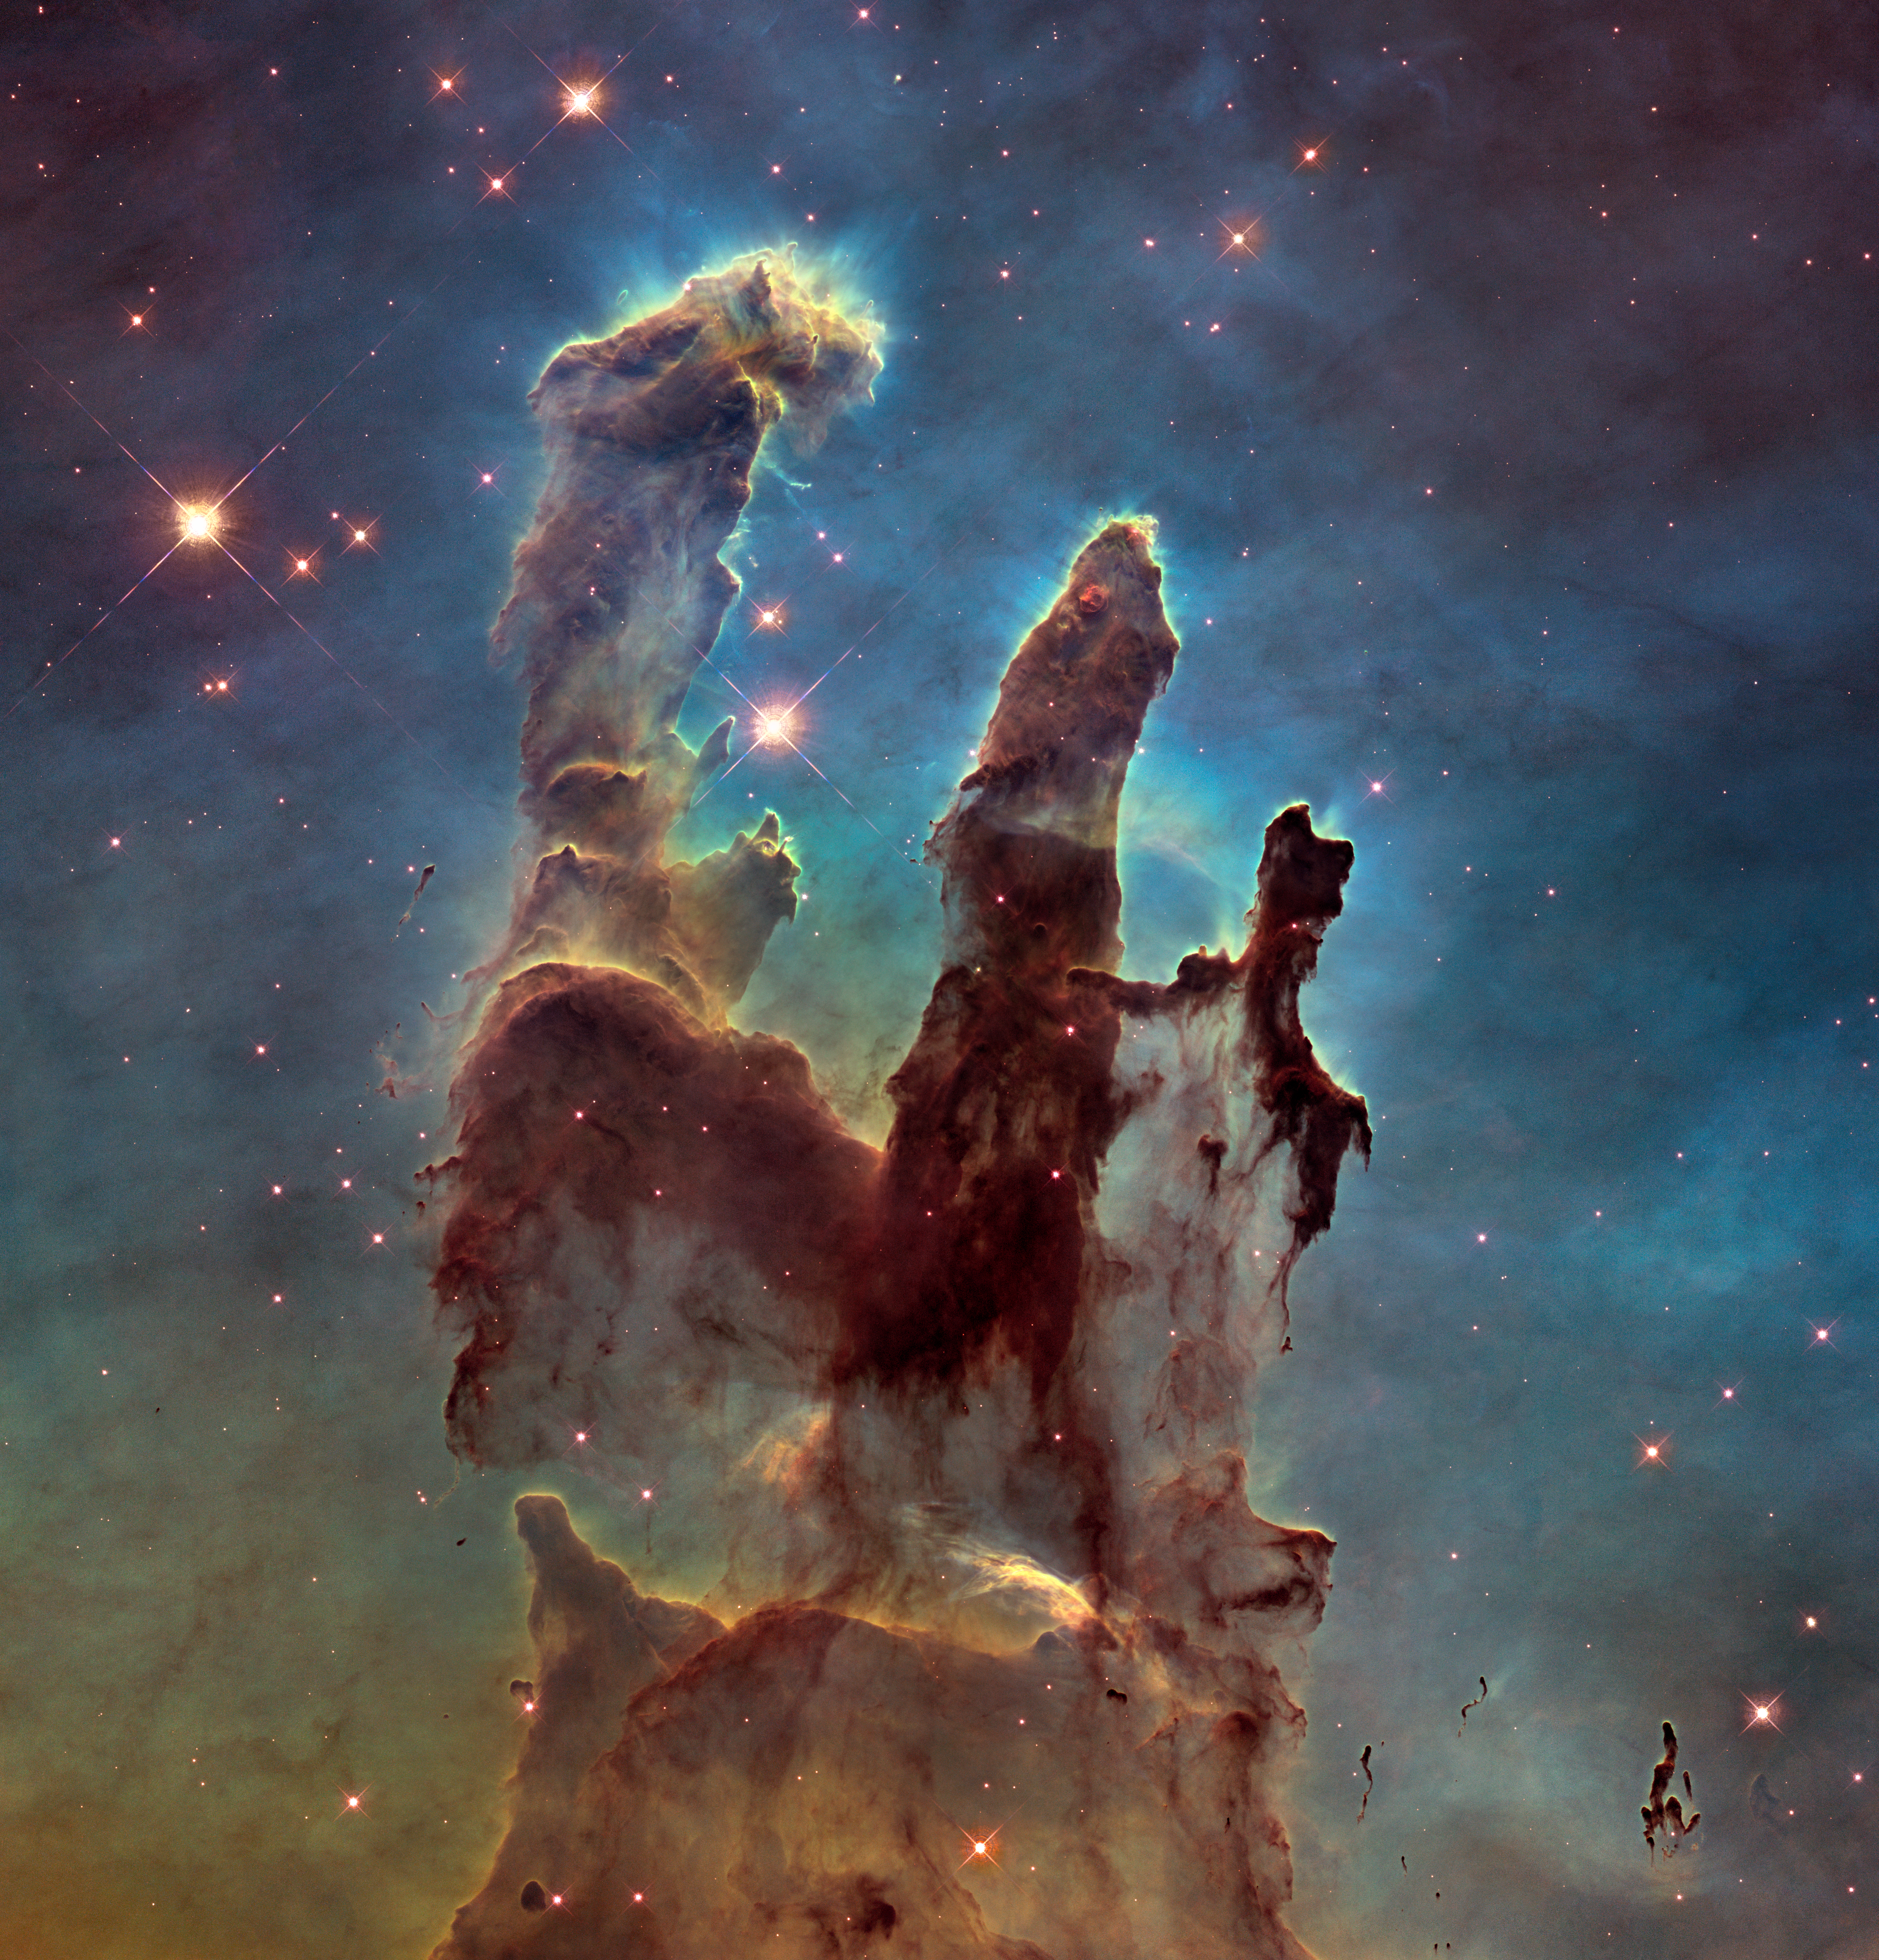

Hubble's View of the Pillars of Creation (2011)

The NASA/ESA Hubble Space Telescope revisited one of its most iconic and popular images, the Eagle Nebula’s Pillars of Creation, in this observation from 2011. This image shows the pillars as seen in visible light, capturing the multi-coloured glow of gas clouds, wispy tendrils of dark cosmic dust, and the rust-coloured elephants’ trunks of the nebula’s famous pillars.The dust and gas in the pillars is seared by the intense radiation from young stars and eroded by strong winds from massive nearby stars. With these new images comes better contrast and a clearer view for astronomers to study how the structure of the pillars is changing over time.

Credit: NASA, ESA/Hubble and the Hubble Heritage Team